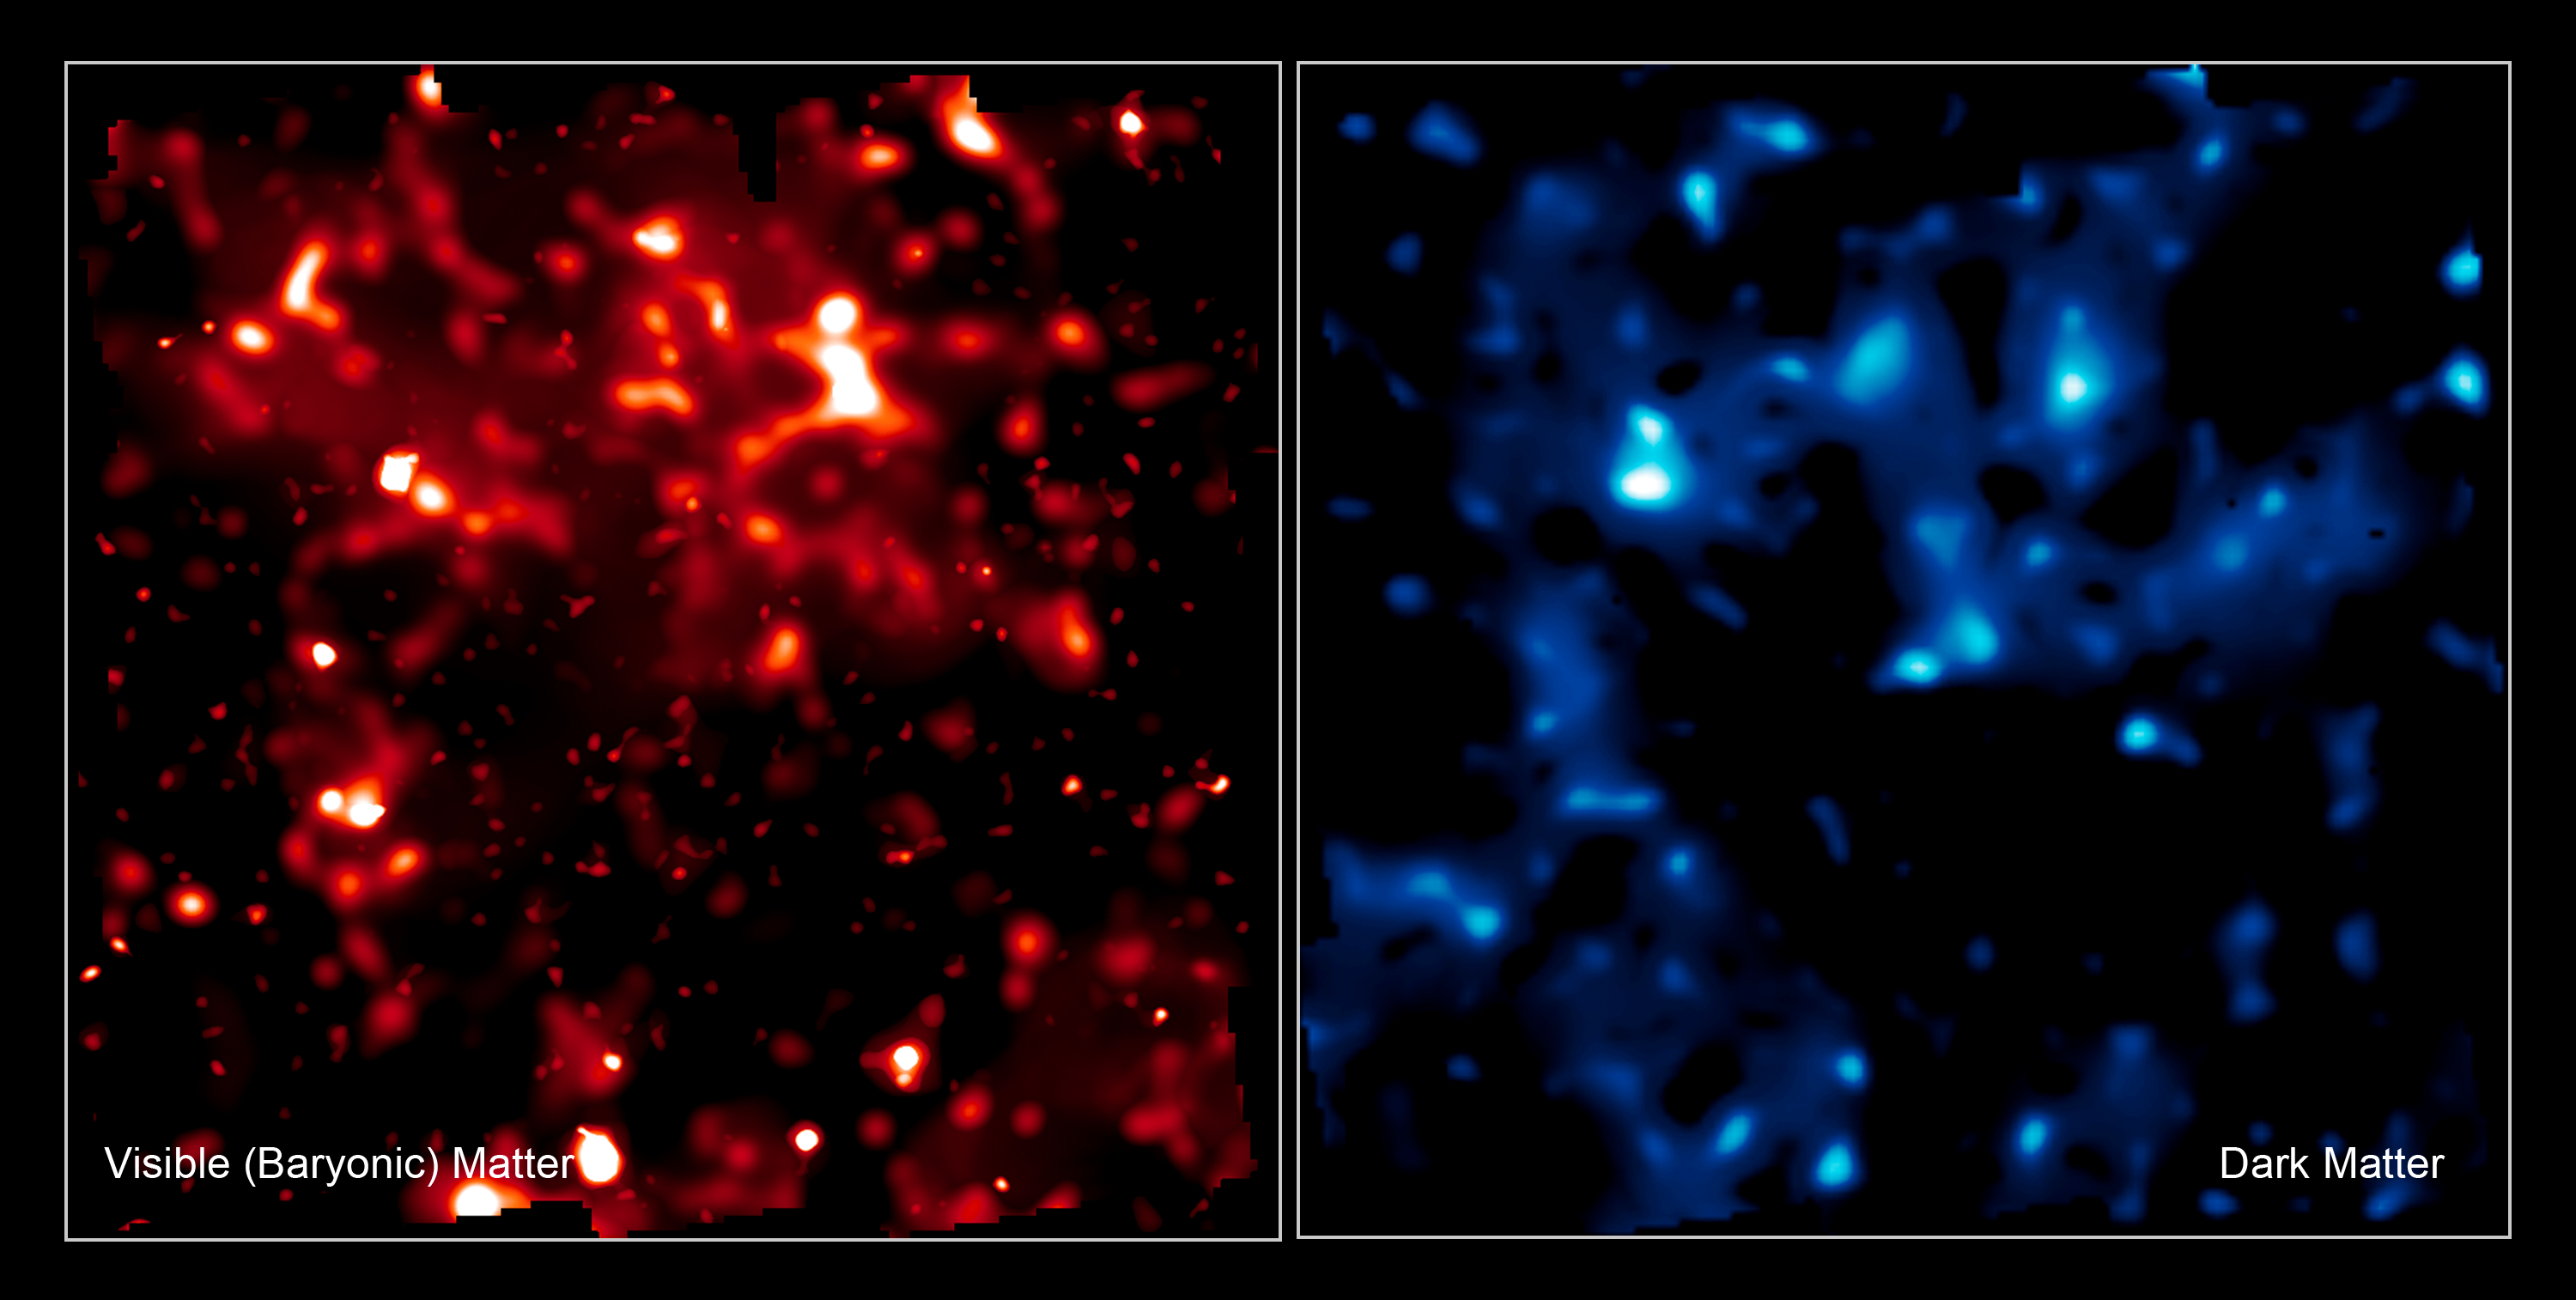

Comparison of normal matter and dark matter's large scale structure

These two false-colour images compare the distribution of normal matter (red, left) with dark matter (blue, right) in the Universe. The brightness of clumps corresponds to the density of mass. The map covers an area of sky nine times the angular diameter of the full Moon, and is the largest sample of the distribution of dark matter ever obtained. It demonstrates how normal matter - including stars, galaxies and gas - is built inside an underlying scaffolding of dark matter. The comparison of dark matter and normal matter will provide critical observational underpinnings to future theories for how structure formed in the evolving Universe under the relentless pull of gravity.

Dark matter is an invisible form of matter comprising the bulk of the Universe's mass. Because the dark matter can't be seen directly, its distribution on the sky is measured via weak gravitational lensing. This is the distortion of light from distant galaxies (rather like the effect of a funhouse mirror), due to the gravitational warping of space by dark matter along our line of sight. The Hubble Space Telescope's keen ability to measure these distortions allowed this map to be created with fine resolution. Constructing the entire map required the measurement of the shapes of half a million background galaxies.

The map was derived from the Hubble Space Telescope's largest ever survey of the Universe, the Cosmic Evolution Survey ("COSMOS"), carried out by an international team of 70 astronomers. In making the COSMOS survey, Hubble photographed 575 adjacent and slightly overlapping views of the universe using the Advanced Camera for Surveys' (ACS) Wide Field Camera onboard Hubble. It took nearly 1,000 hours of observations. The distances to the galaxies were determined from their spectral redshifts, using the Subaru telescope in Hawaii. The distribution of additional gas outside galaxies was measured with the European Space Agency's XMM/Newton telescope.

Credit: NASA, ESA and R. Massey (California Institute of Technology)